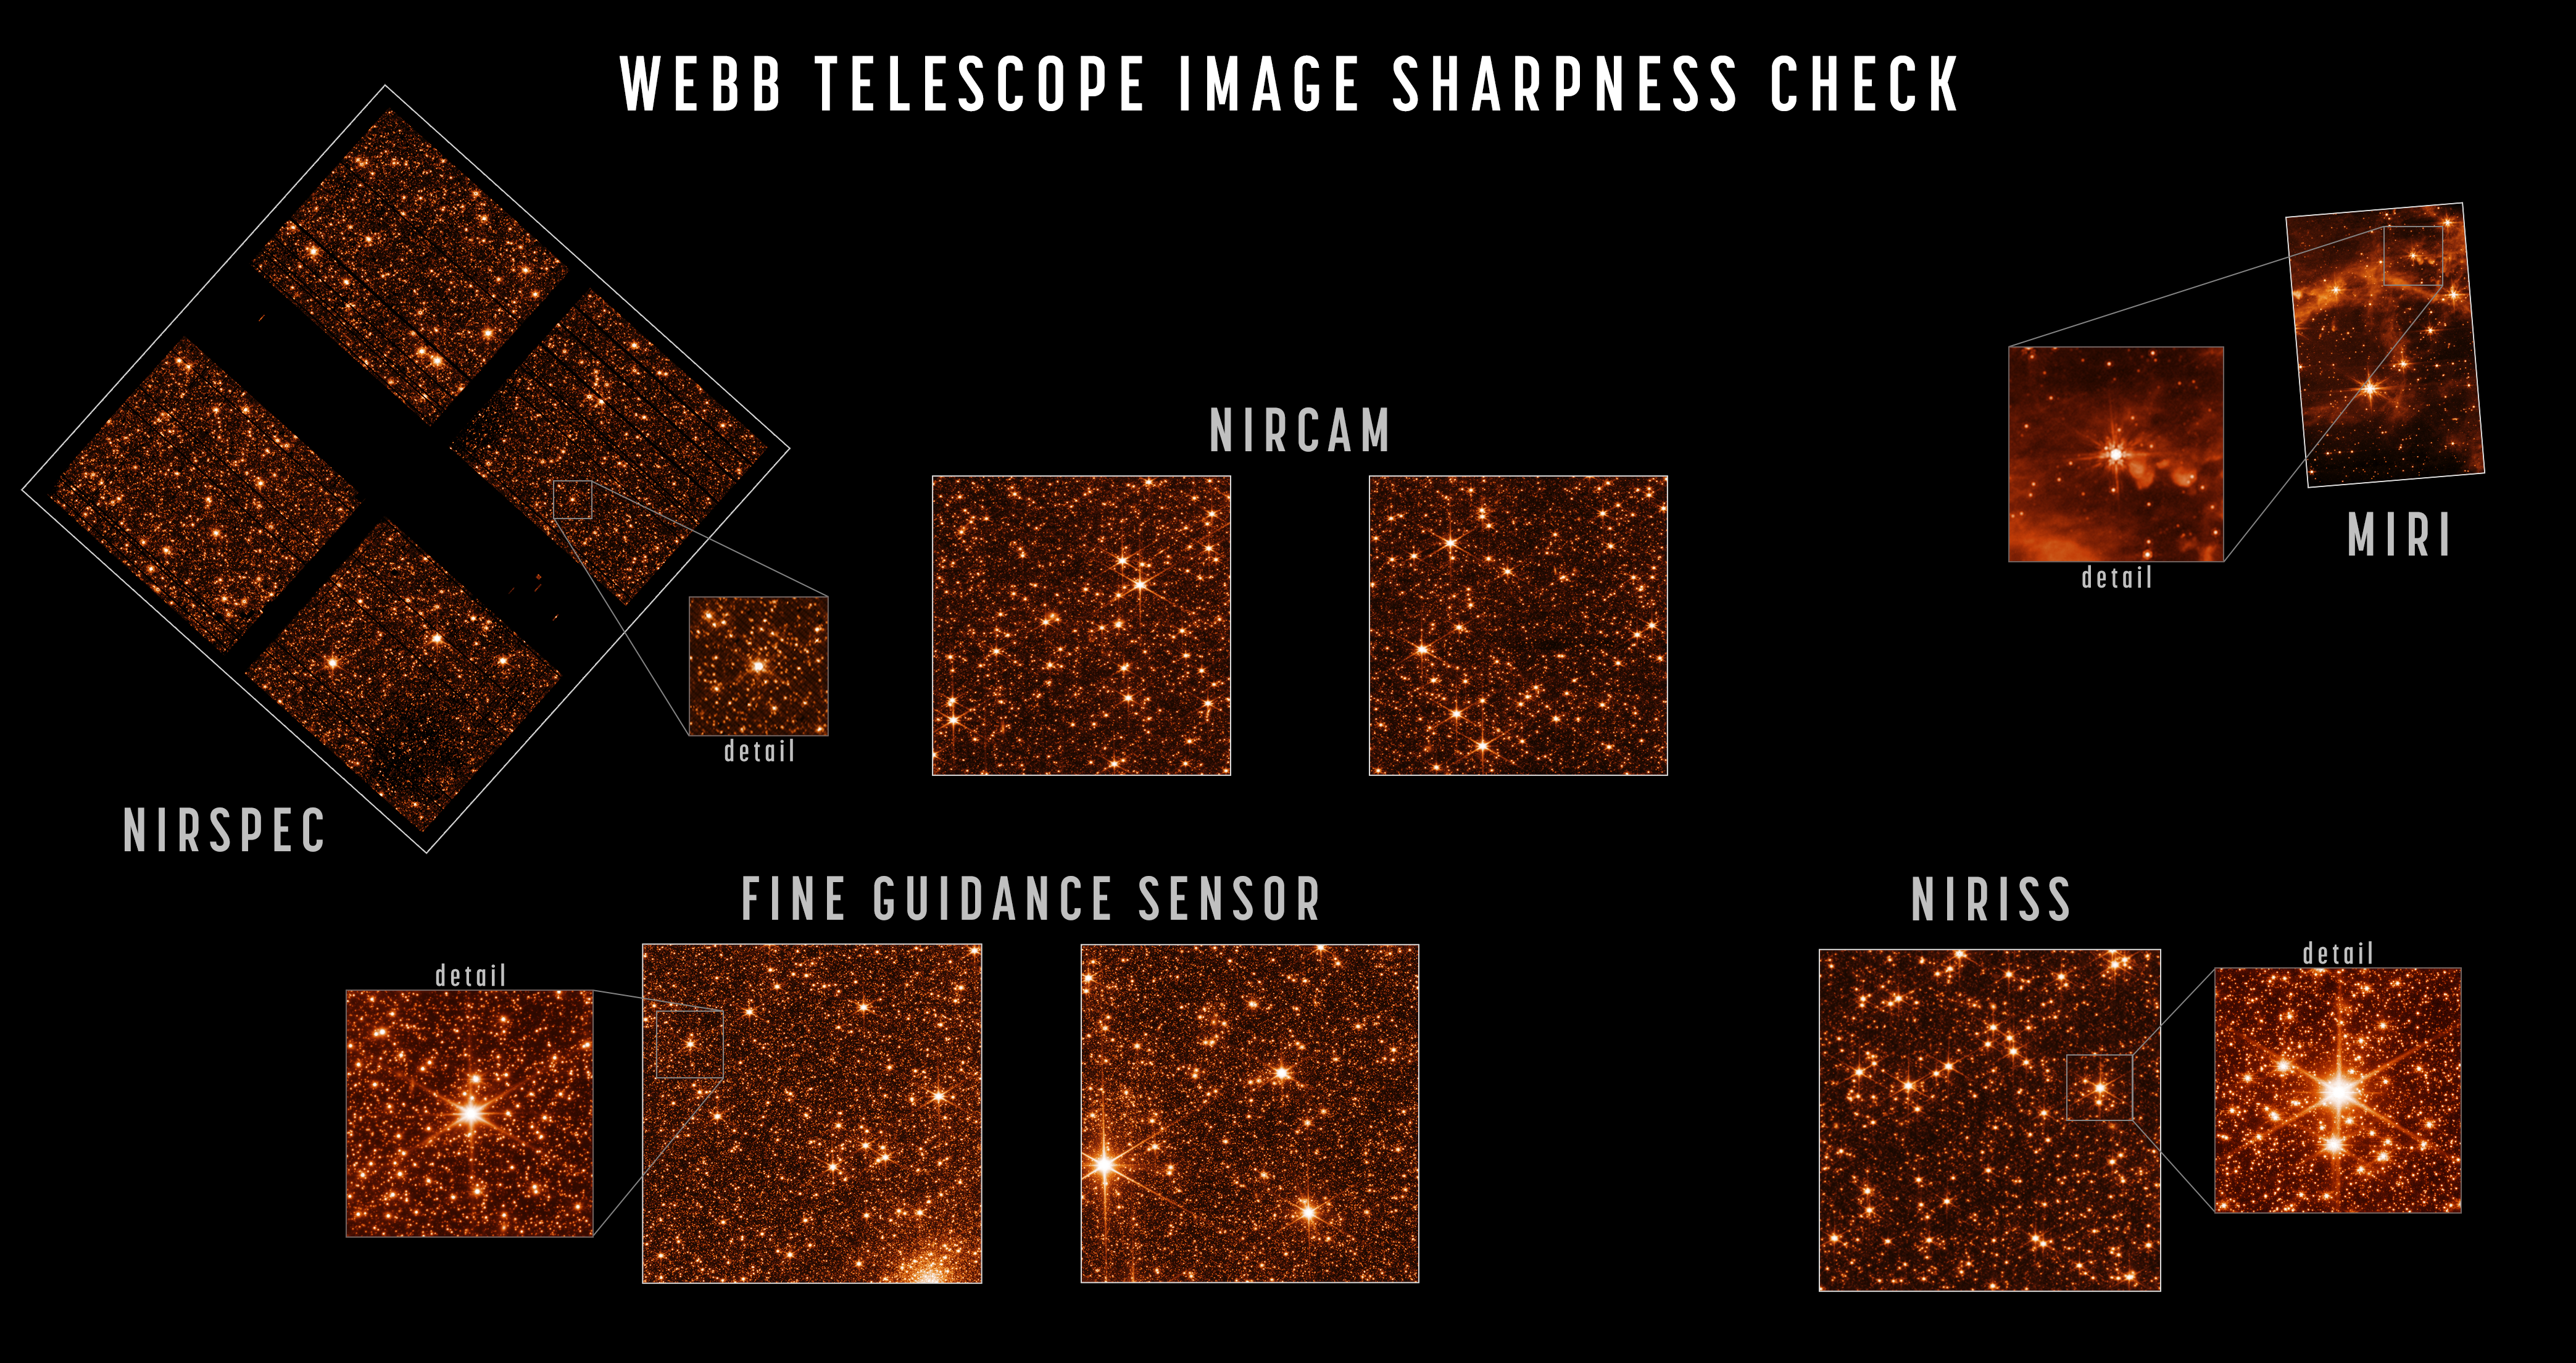

Webb in Full Focus

Alignment of the NASA/ESA/CSA James Webb Space Telescope is now complete. After full review, the observatory has been confirmed to be capable of capturing crisp, well-focused images with each of its four powerful onboard science instruments.

Upon completing the seventh and final stage of telescope alignment, the team held a set of key decision meetings and unanimously agreed that Webb is ready to move forward into its next and final series of preparations, known as science instrument commissioning. This process of setting up and testing the instruments will take about two months before scientific operations begin in the summer.

The alignment of the telescope across all of Webb’s instruments can be seen in a series of images that captures the observatory’s full field of view.

Engineering images of sharply focused stars in the field of view of each instrument demonstrate that the telescope is fully aligned and in focus. For this test, Webb pointed at part of the Large Magellanic Cloud, a small satellite galaxy of the Milky Way, providing a dense field of hundreds of thousands of stars across all the observatory’s sensors.

The sizes and positions of the images shown here depict the relative arrangement of each of Webb’s instruments in the telescope’s focal plane, each pointing at a slightly offset part of the sky relative to one another.

Webb’s three imaging instruments are NIRCam (images shown here at a wavelength of 2 microns), NIRISS (image shown here at 1.5 microns), and MIRI (shown at 7.7 microns, a longer wavelength revealing emission from interstellar clouds as well as starlight).

ESA's NIRSpec is a spectrograph rather than imager but can take images, such as the 1.1 micron image shown here, for calibrations and target acquisition. The dark regions visible in parts of the NIRSpec data are due to structures of its microshutter array, which has several hundred thousand controllable shutters that can be opened or shut to select which light is sent into the spectrograph.

Lastly, Webb’s Fine Guidance Sensor tracks guide stars to point the observatory accurately and precisely; its two sensors are not generally used for scientific imaging but can take calibration images such as those shown here. This image data is used not just to assess image sharpness but also to precisely measure and calibrate subtle image distortions and alignments between sensors as part of Webb’s overall instrument calibration process.

The optical performance of the telescope continues to be better than the engineering team’s most optimistic predictions. Webb’s mirrors are now directing fully focused light collected from space down into each instrument, and each instrument is successfully capturing images with the light being delivered to them. The image quality delivered to all instruments is “diffraction-limited,” meaning that the fineness of detail that can be seen is as good as physically possible given the size of the telescope. From this point forward the only changes to the mirrors will be very small, periodic adjustments to the primary mirror segments.

Credit: NASA/STScI